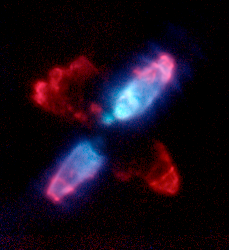

NICMOS Peers Into Heart of Dying Star

The Egg Nebula, also known as CRL 2688, is shown as it appears in infrared light with Hubble's Near Infrared Camera and Multi-Object Spectrometer (NICMOS).

Credit: Rodger Thompson, Marcia Rieke, Glenn Schneider, Dean Hines (Universityof Arizona); Raghvendra Sahai (Jet Propulsion Laboratory); NICMOS Instrument Definition Team; and NASA/ESA